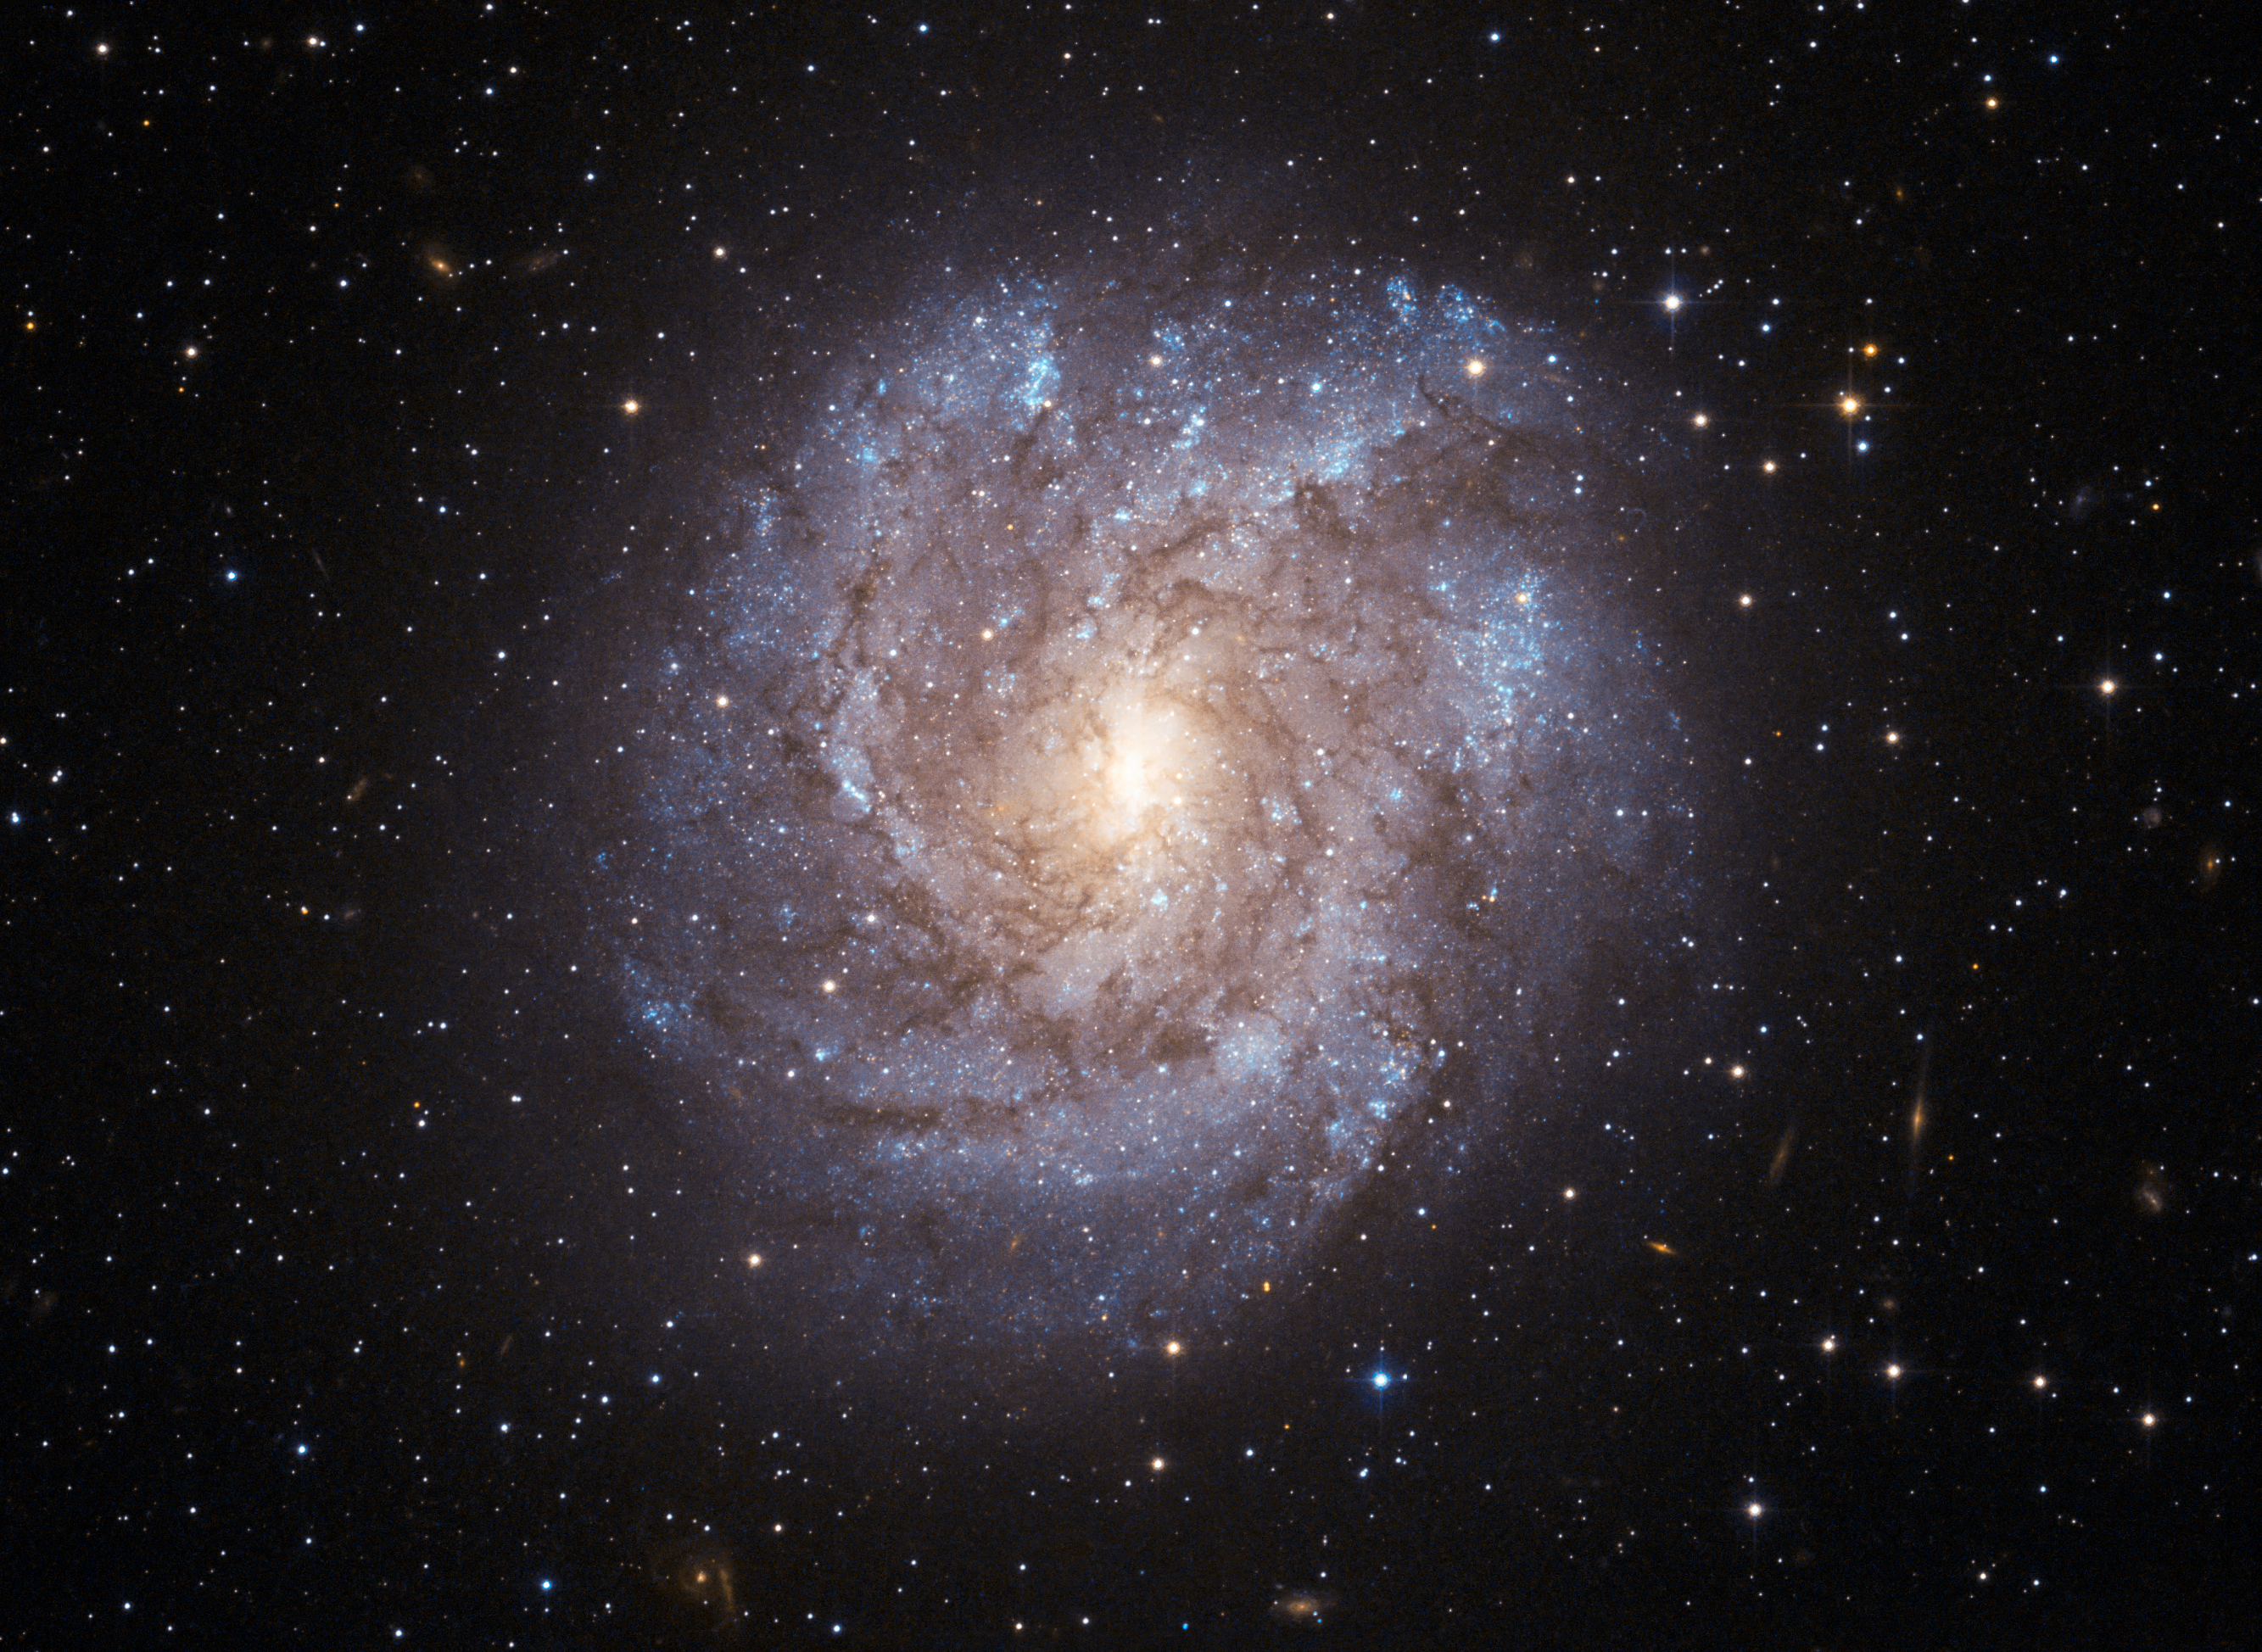

The dusty beauty of NGC 2082

The richly textured spiral galaxy NGC 2082 is found about 60 million light-years away in the constellation of Dorado (the Swordfish), deep in the southern sky. As seen here in a very detailed image from the Advanced Camera for Surveys on the NASA/ESA Hubble Space Telescope, filaments of dark dust splay across NGC 2082’s luminous curved arms and dense central bulge of stars. Hubble’s sharp vision also reveals many of the individual bright blue stars dotting the galaxy’s rather ragged spiral arms as well as many much more distant galaxies in the background.

This galaxy is faintly visible in backyard telescopes and was first recorded by Sir John Herschel during his visit to the Cape of Good Hope in South Africa in the 1830s. NGC 2082 was also the host of a bright supernova that was spotted by the great visual supernova discoverer Rev R. Evans back in 1992.

This picture was created from images taken through blue and near-infrared filters (F435W and F814W) using the Wide Field Channel of the Advanced Camera for Surveys. The total exposure time was 19 minutes per filter and the field of view is about 2.2 x 1.6 arcminutes in size.

Credit: ESA/Hubble and NASA